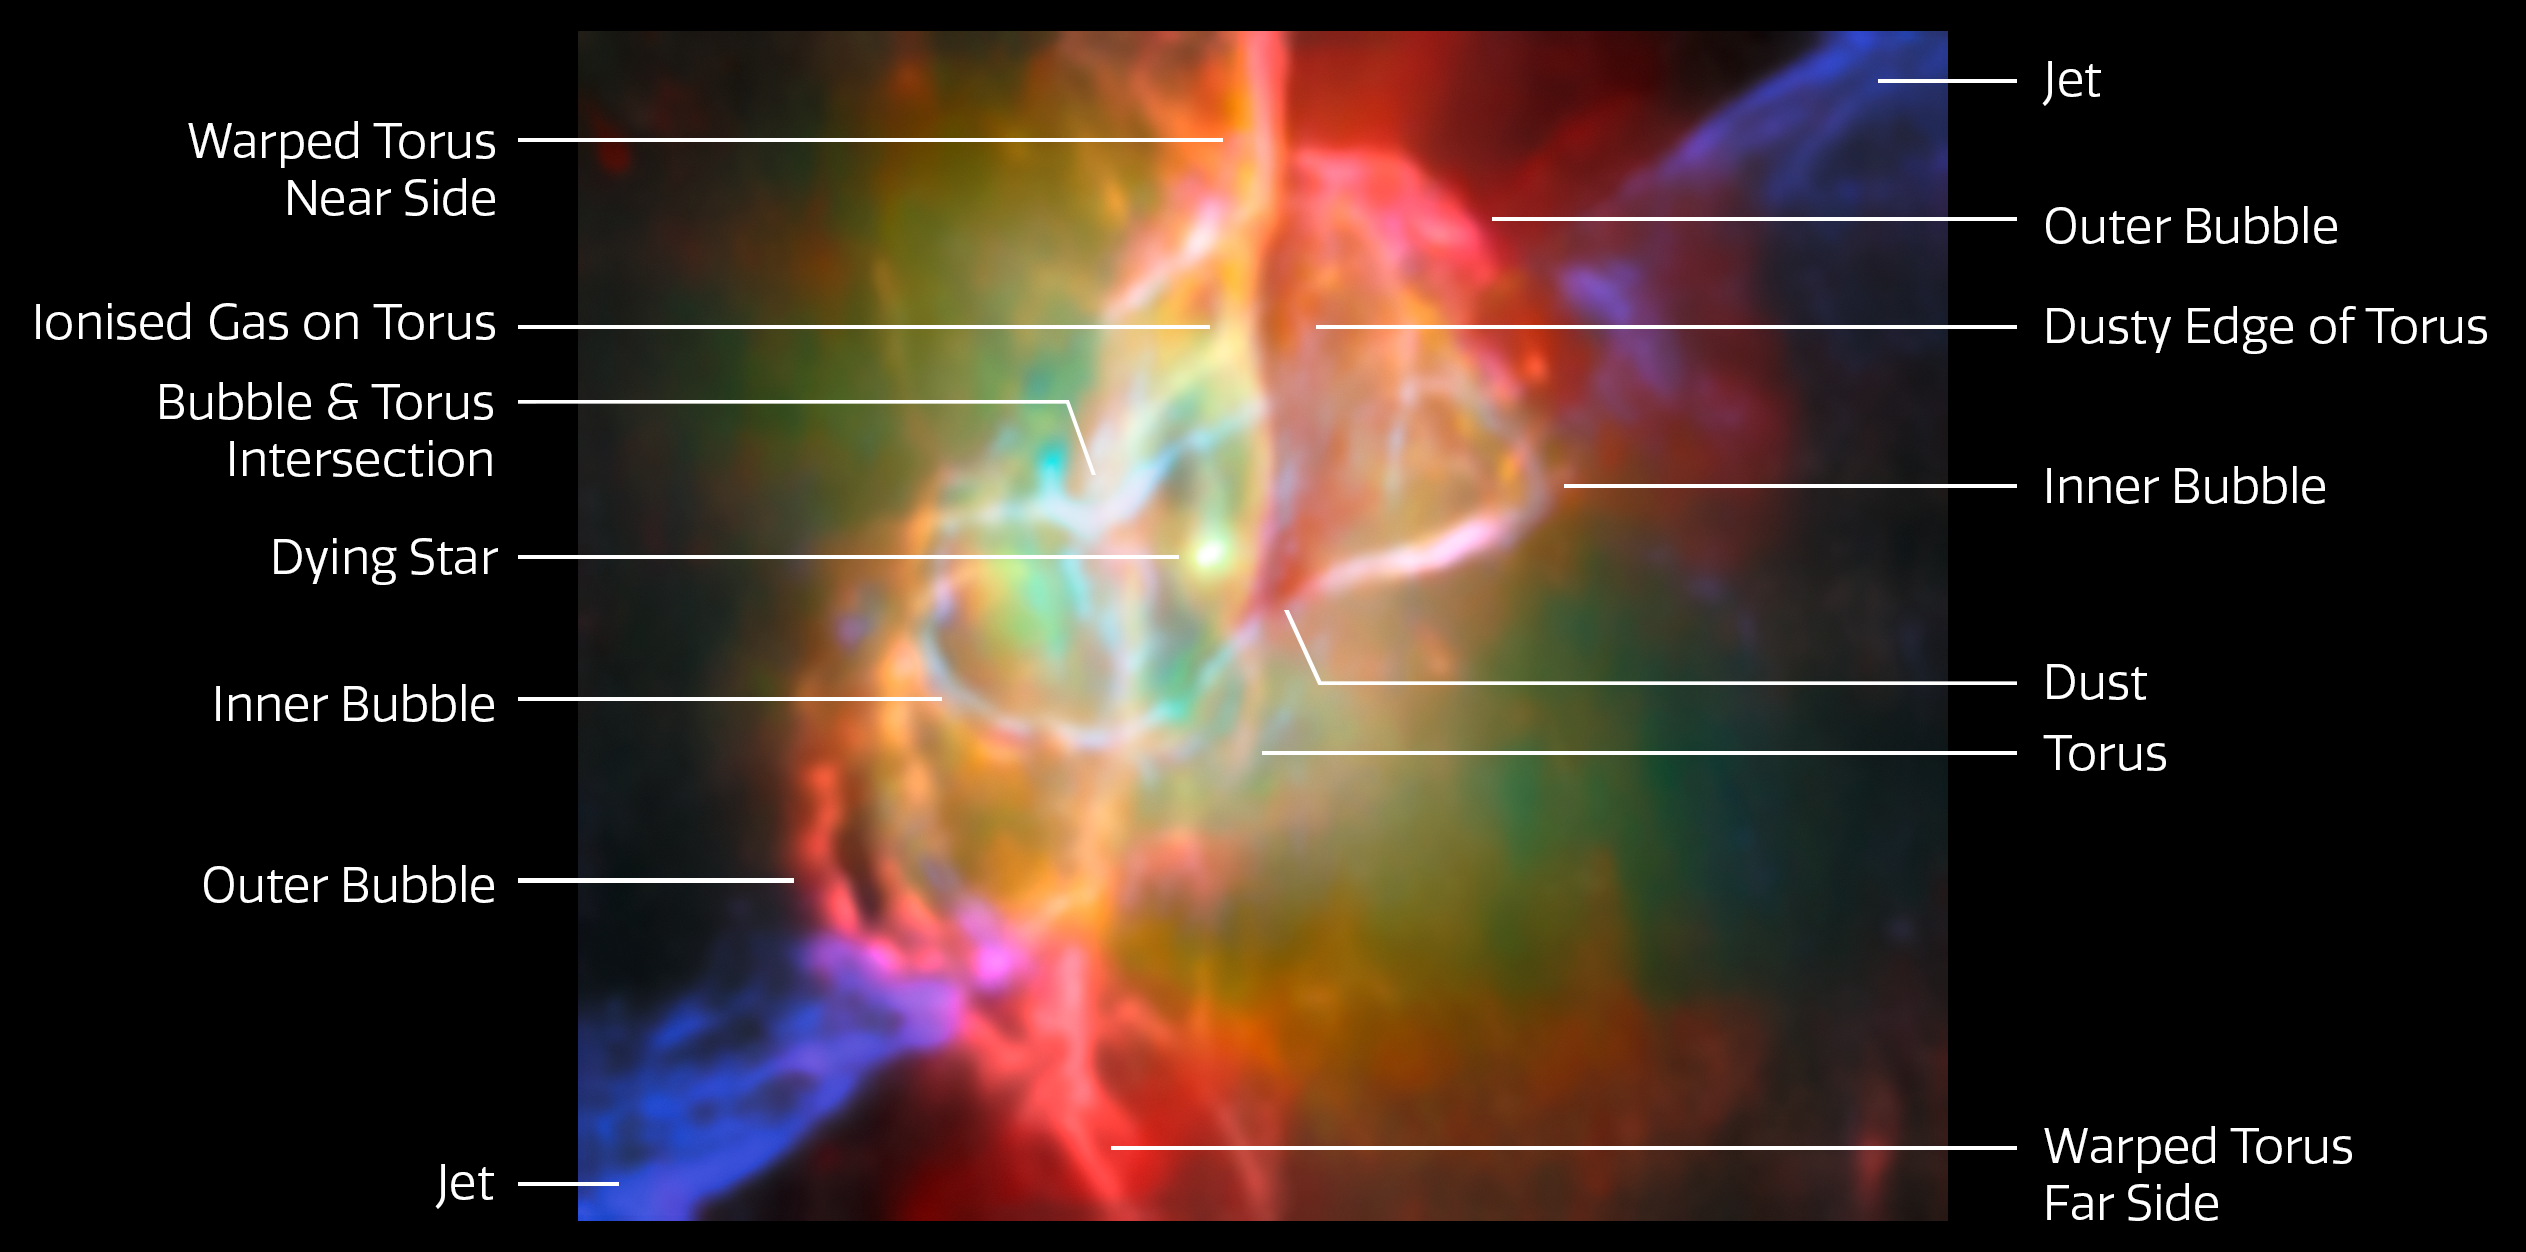

Butterfly Nebula NGC 6302 (Webb and ALMA image, annotated)

This annotated image takes the viewer on a deep dive into the heart of the Butterfly Nebula, NGC 6302, as seen by the NASA/ESA/CSA James Webb Space Telescope. The Butterfly Nebula, located about 3400 light-years away in the constellation Scorpius, is one of the best-studied planetary nebulae in our galaxy.

Planetary nebulae are among the most beautiful and most elusive creatures in the cosmic zoo. These nebulae form when stars with masses between about 0.8 and 8 times the mass of the Sun shed most of their mass at the end of their lives. The planetary nebula phase is fleeting, lasting only about 20 000 years.

At the centre of the Butterfly Nebula is the ancient core of a Sun-like star that energises the surrounding nebula and causes it to glow. This scorching central star is hidden from view at optical wavelengths, but Webb’s infrared capabilities have revealed the star and its surroundings in great detail.

This image, which combines infrared data from Webb with submillimetre observations from the Atacama Large Millimetre/submillimetre Array (ALMA), shows the doughnut-shaped torus and interconnected bubbles of dusty gas that surround the nebula’s central star. The torus is oriented vertically and nearly edge-on from our perspective, and it intersects with bubbles of gas enclosing the star. The bubbles appear bright red in this image, illuminated by the light from helium and neon gas. Outside the bubbles, jets traced by emission from ionised iron shoot off in opposite directions.

Credit: ESA/Webb, NASA & CSA, M. Matsuura, ALMA (ESO/NAOJ/NRAO), N. Hirano, M. Zamani (ESA/Webb)